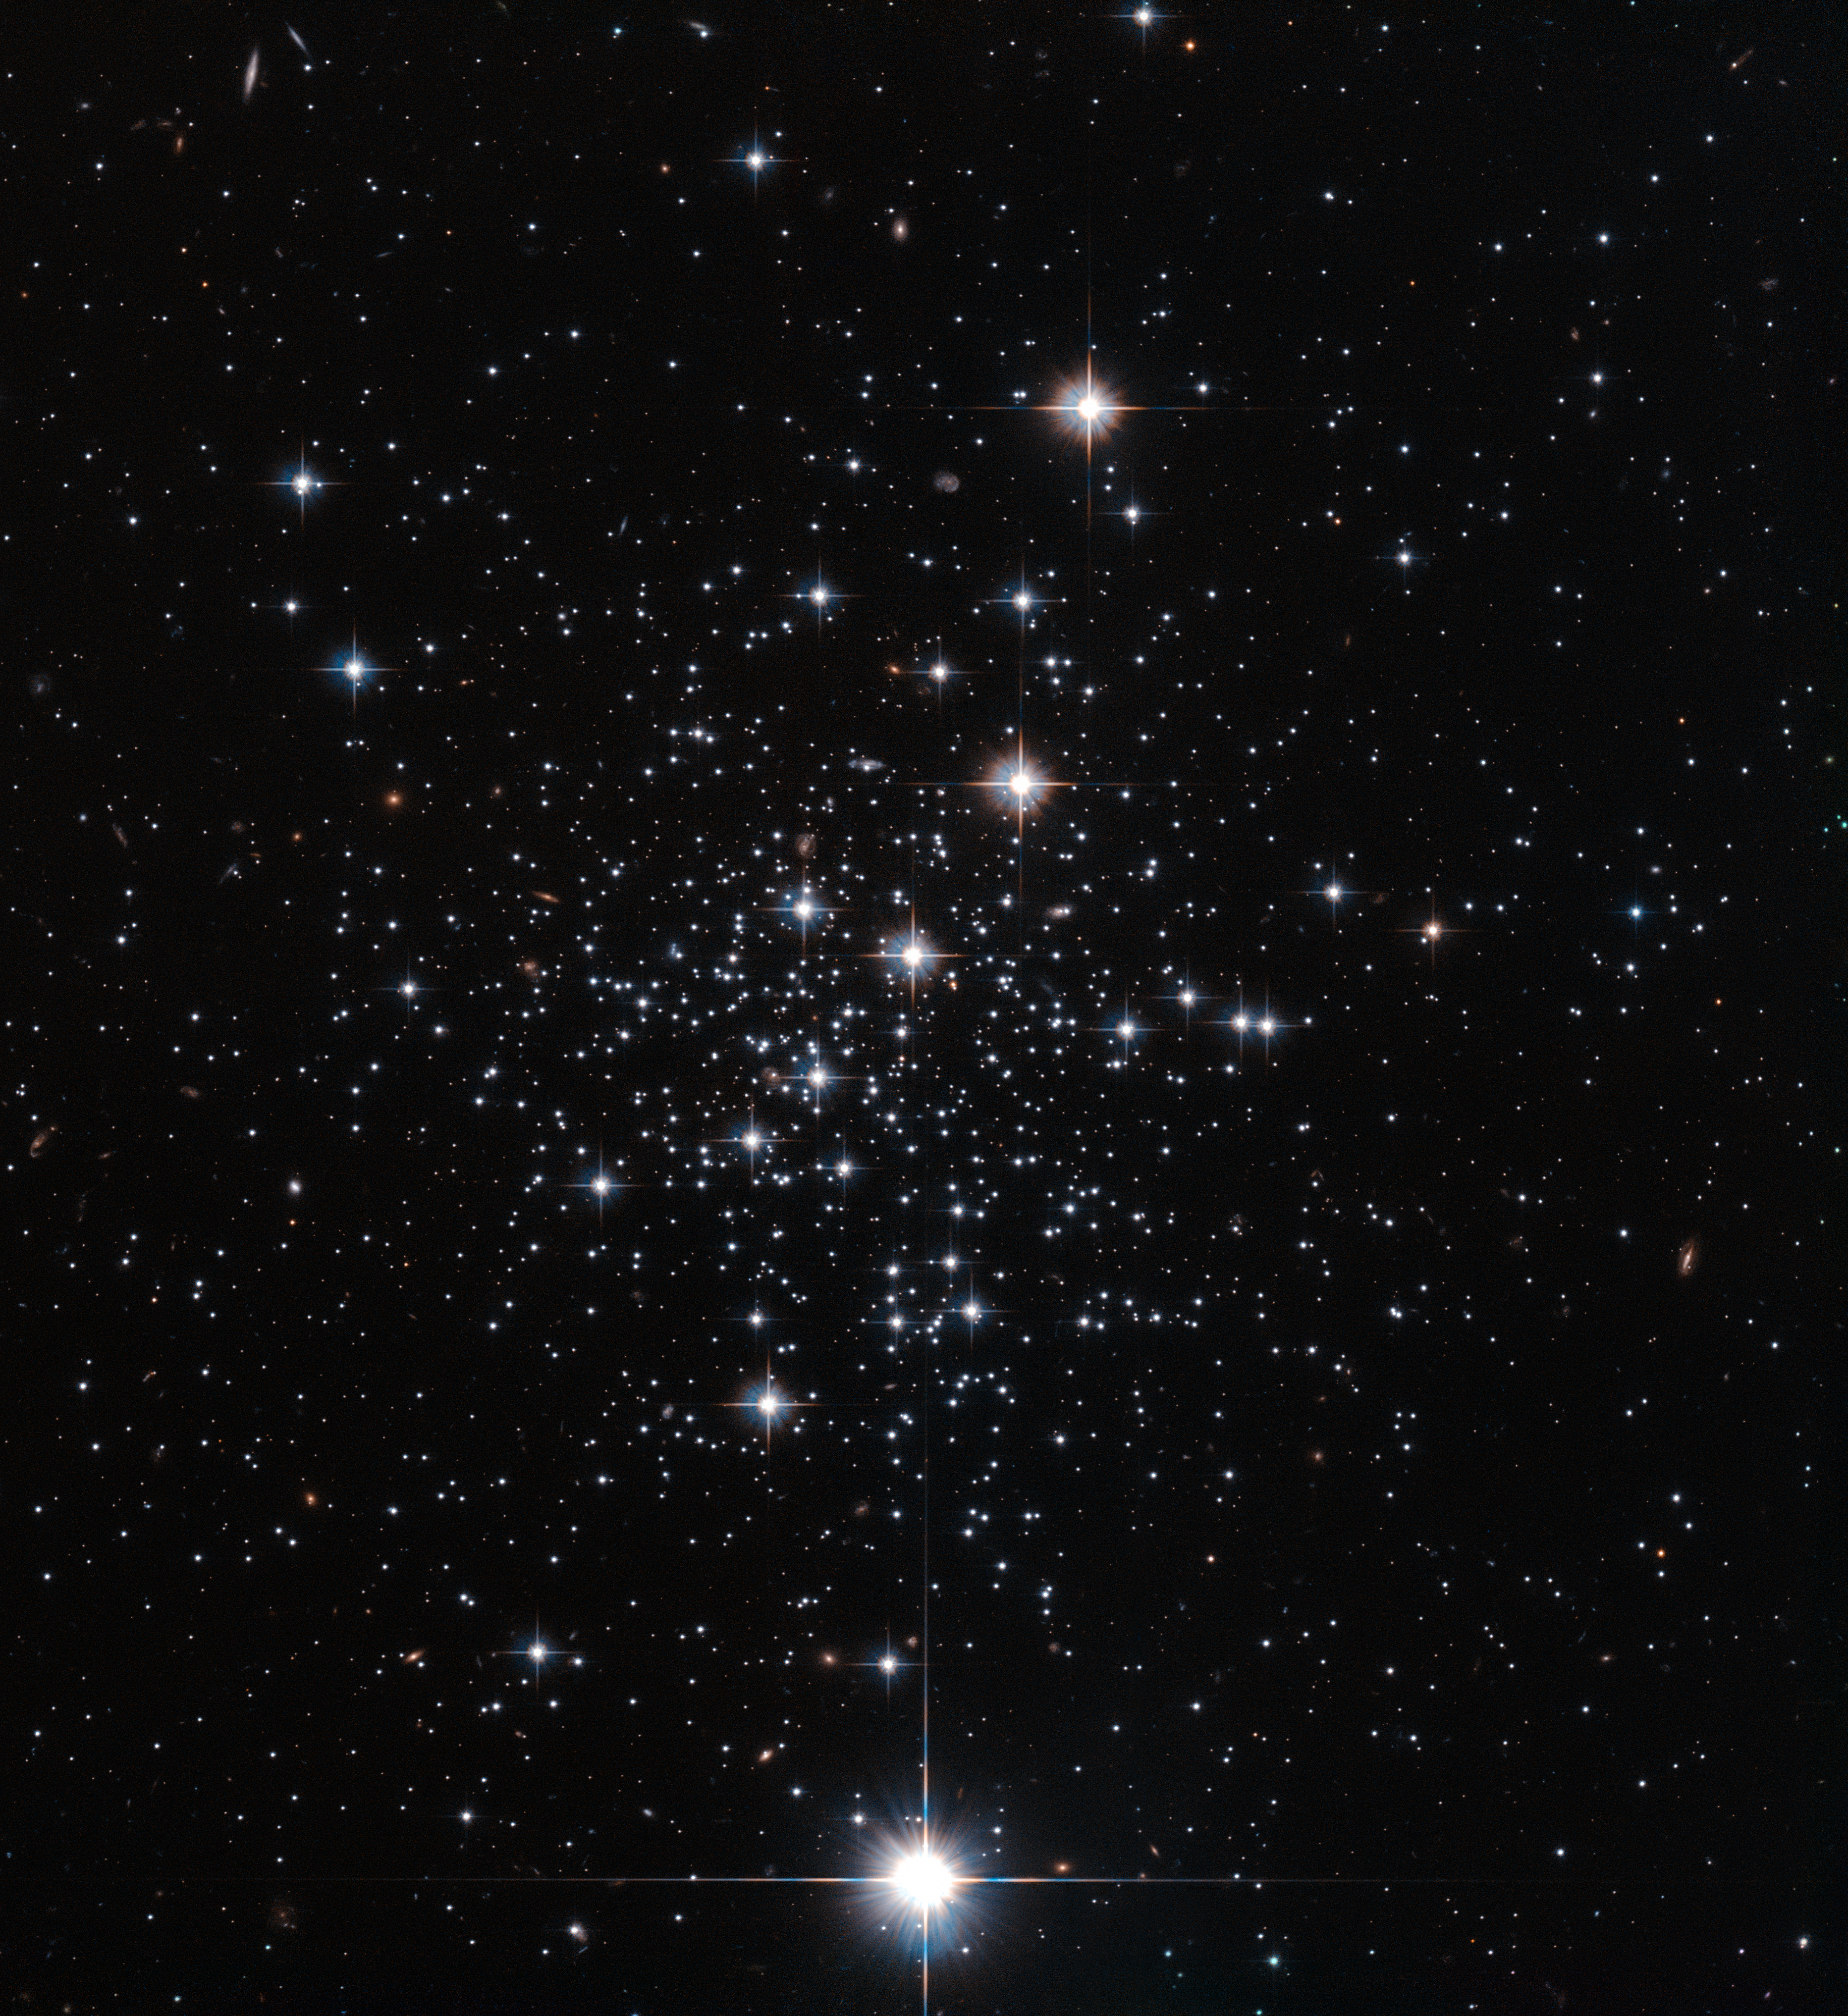

Panta rhei — motion in the Milky Way

Panta rhei is a simplified version of the famous greek philosopher Heraclitus' teachings. It basically means, everything flows. And everything in the Universe is indeed continually on the move, spiralling and shifting through space.

Some cosmic objects move a little further than others — take the subject of this NASA/ESA Hubble Space Telescope image, a globular cluster of stars known as Palomar 12.

Although it currently lies on the outskirts of the Milky Way’s halo, Palomar 12 was not born here. When astronomers first studied this cluster, they were puzzled by its strangely young age when compared to the other clusters in the galaxy. It appeared to be around 30% younger than other Milky Way globulars. Surely if it had been born within our galaxy, it would have sprung to life at a similar time to its cluster companions?

A bit more digging revealed that Palomar 12 was actually ripped from its initial home, the Sagittarius Dwarf Elliptical galaxy, around 1.7 billion years ago via tidal interactions between its former home and our galaxy. The dwarf galaxy that Palomar 12 once called home is a satellite galaxy to ours, and closely orbits around us — even occasionally passing through the plane of our galaxy. In fact, it is being slowly torn apart and consumed by the Milky Way.

The sparkling stars in this picture were imaged by Hubble’s Advanced Camera for Surveys.

Credit: ESA/Hubble & NASA